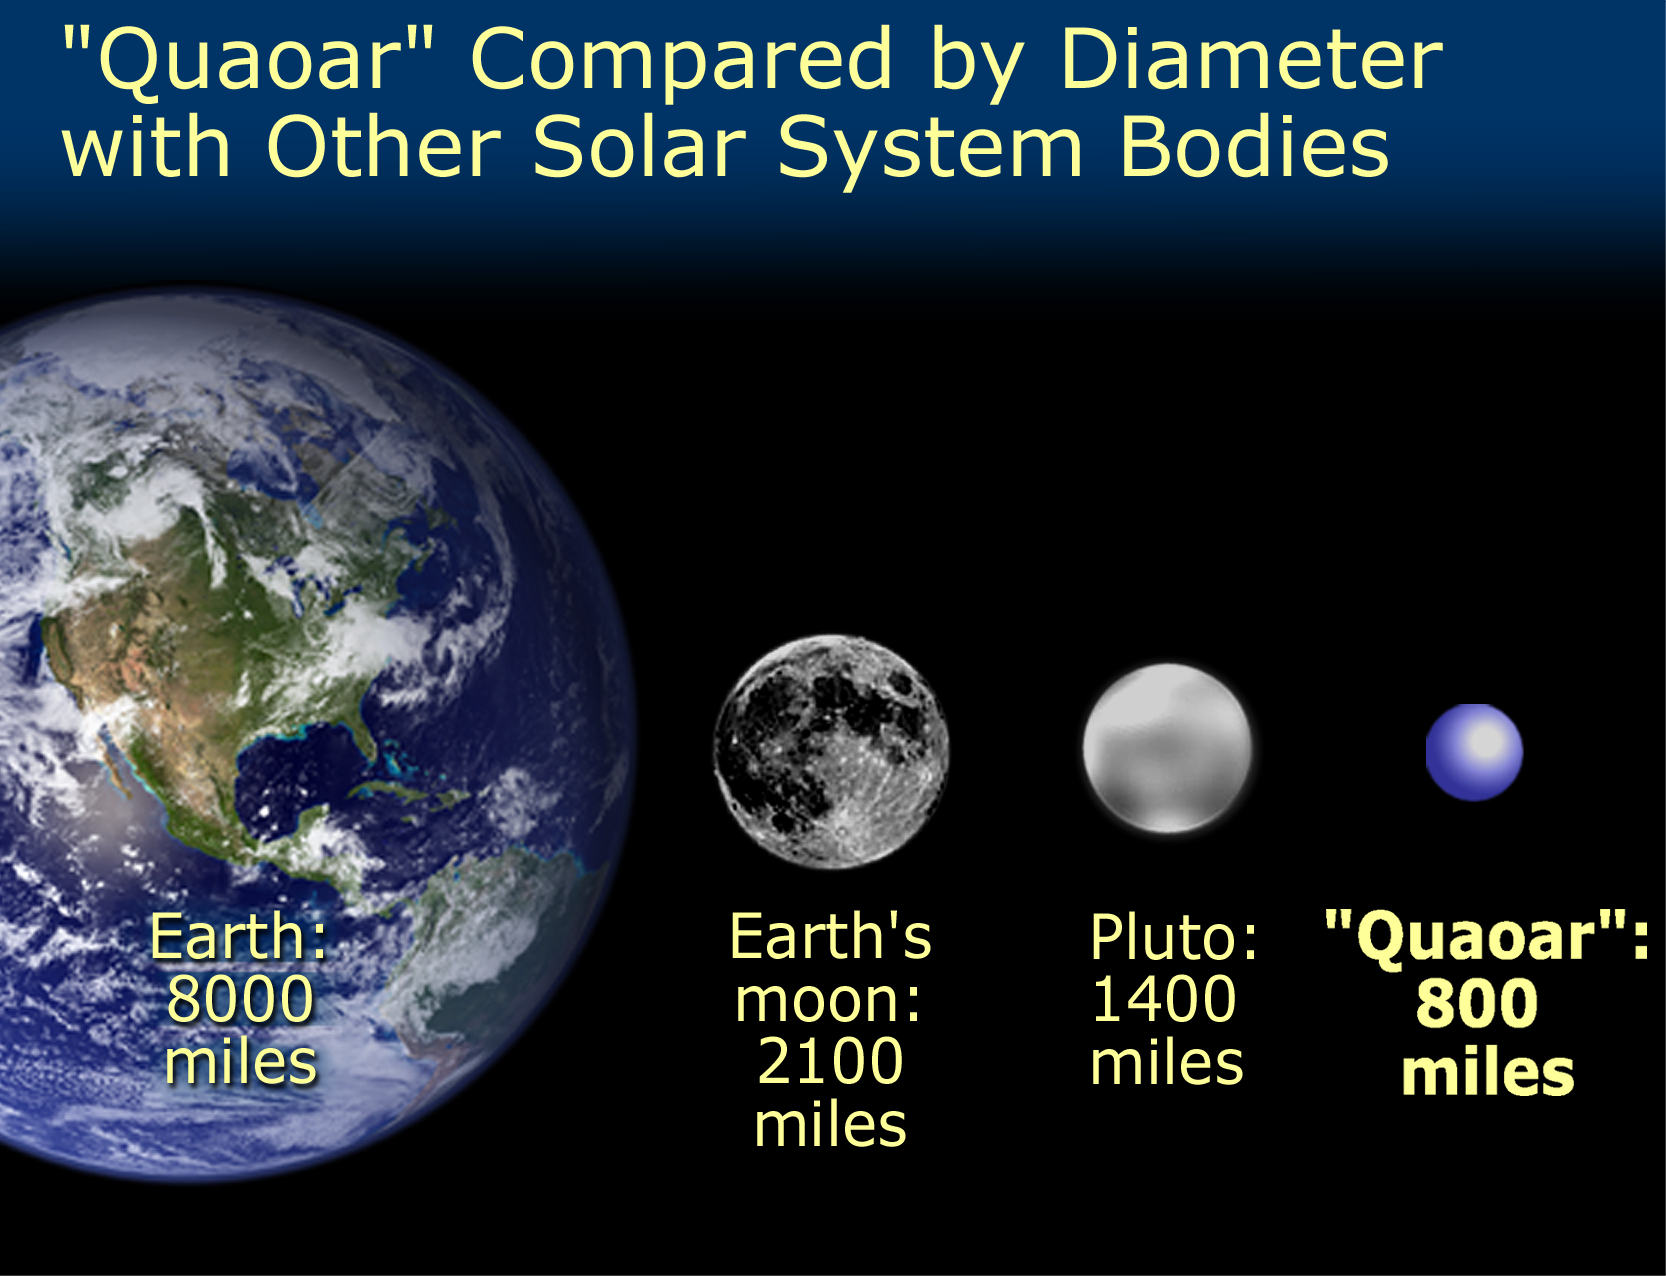

Quaoar's size compared with Pluto, Earth's Moon, and the Earth

Approximately half the size of Pluto, the icy world 2002 LM60, dubbed "Quaoar" (pronounced kwa-whar) by its discoverers, is the farthest object in the solar system ever to be resolved by a telescope.

Credit: NASA/ESA and A. Feild (STScI)